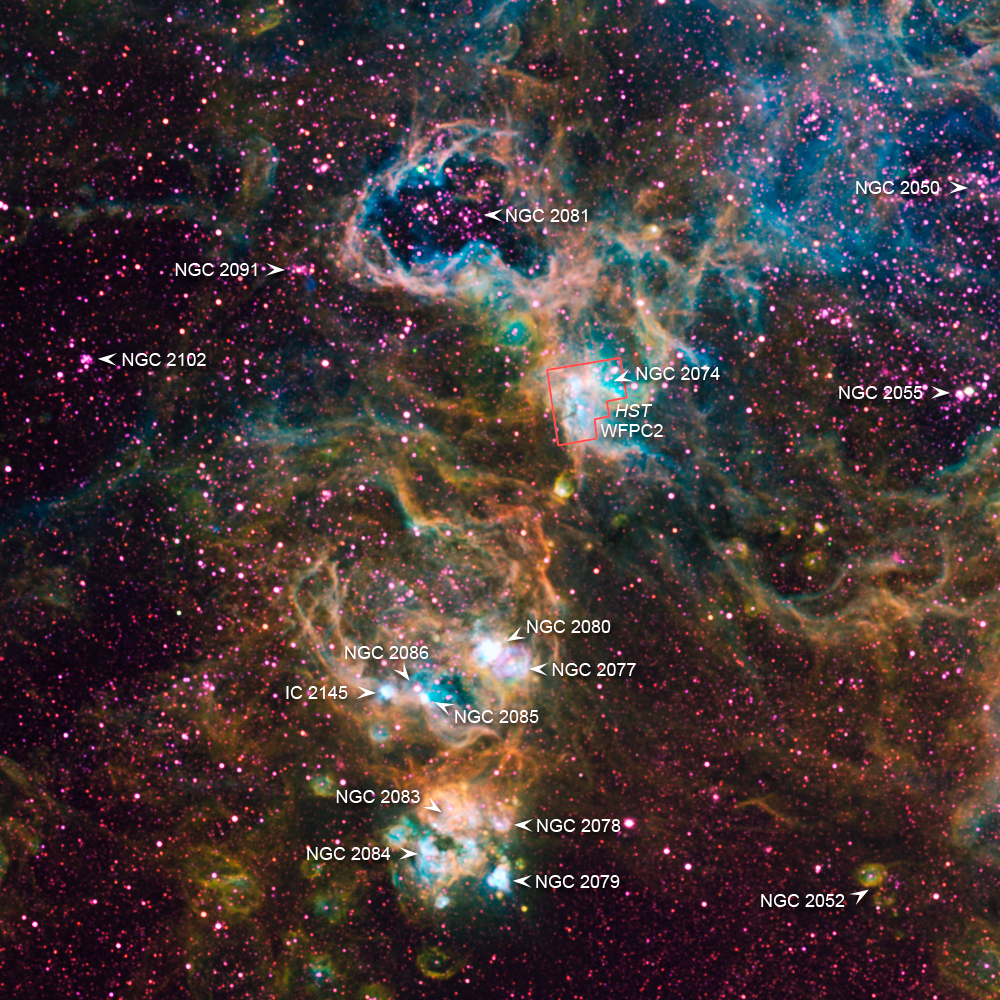

Ground-based image of NGC 2074

This ground-based image shows the region surrounding NGC 2074 in the Large Magellanic Cloud. These visible-light emission-line image was taken on the UM/CTIO Curtis Schmidt telescope at Cerro Tololo Inter-American Observatory (CTIO) as part of the Magellanic Cloud Emission Line Survey (MCELS). The composite image shows emission from oxygen (blue), hydrogen (green), and sulphur (red).

Credit: UM/CTIO MCELS Project/NOAO/AURA/NSF